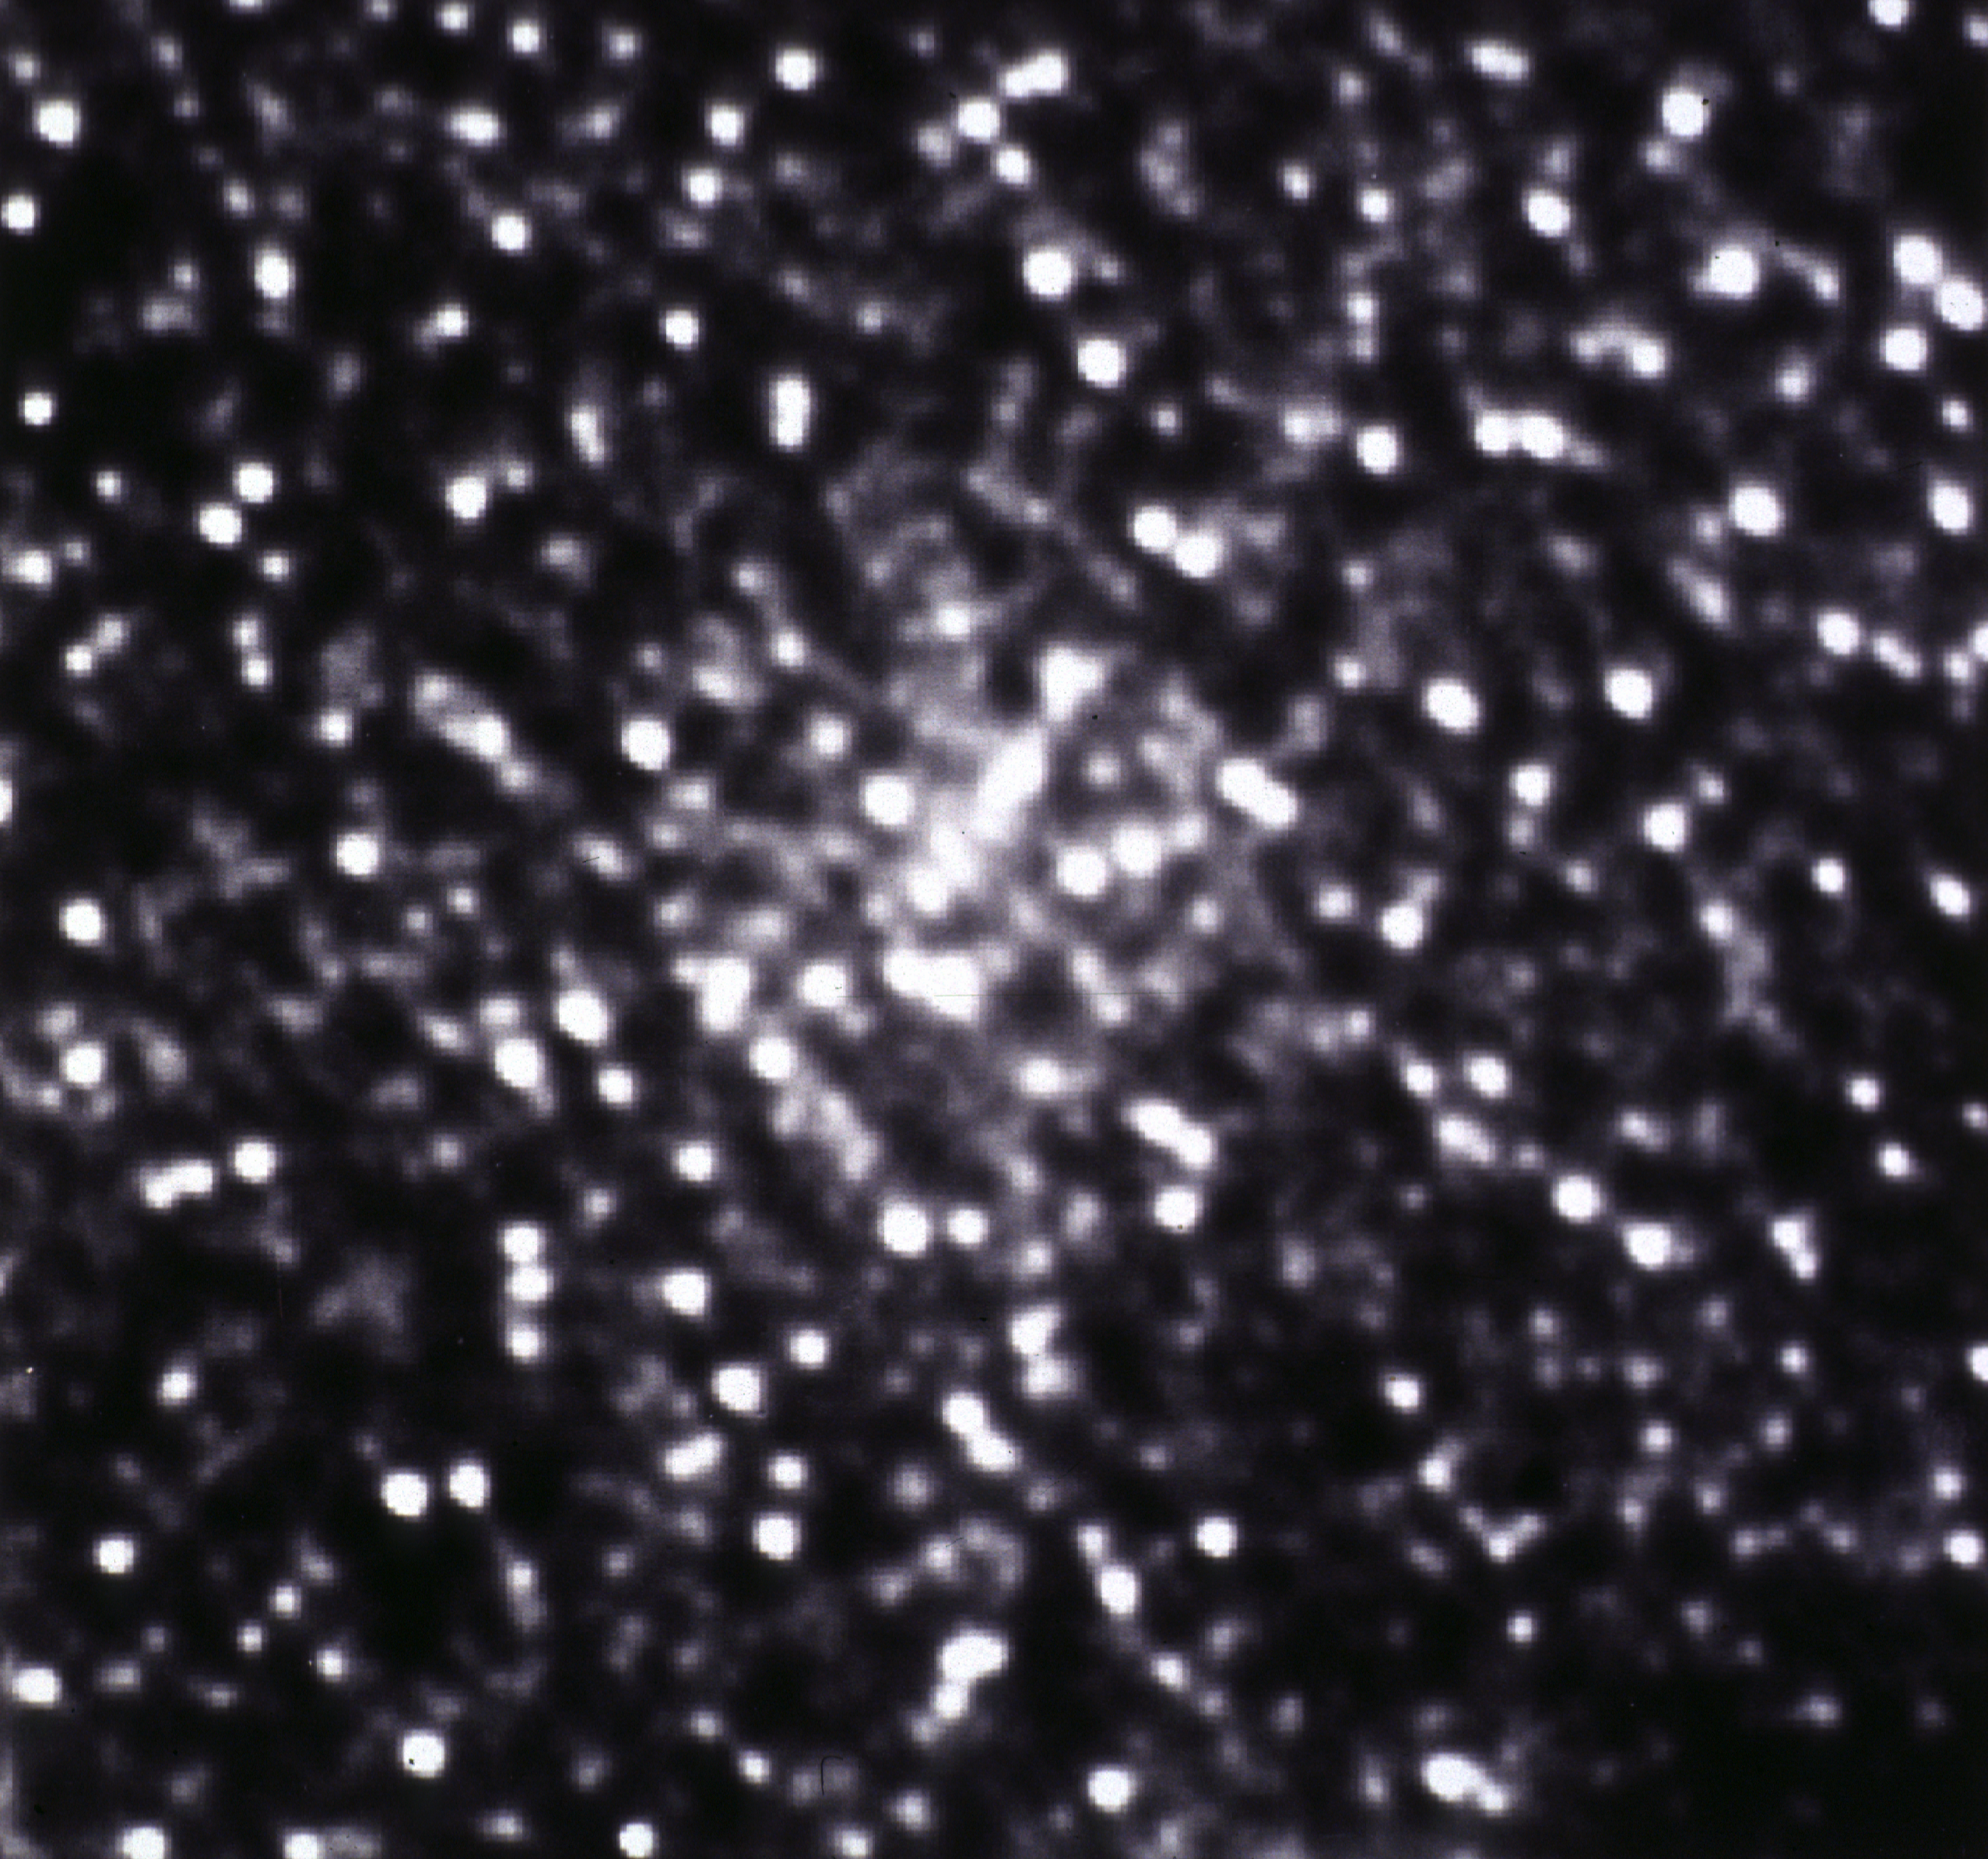

M15 globular cluster core

This picture shows the central region of the globular cluster M15 as imaged by the Planetary Camera of the Hubble Space Telescope. M15 is a tightly bound cluster of about a million stars contained within our own galaxy. At the center of the image, the density of stars is roughly a million times what it is in our own part of the galaxy. Analysis of this image shows that M15 is now recovering from an implosion in which the stars in the cluster center collapsed into a dense aggregate. This image has been processed to remove the effects of spherical aberration. At the distance of M15, the region shown is 2.26 light years on a side.

Credit: NASA/ESA